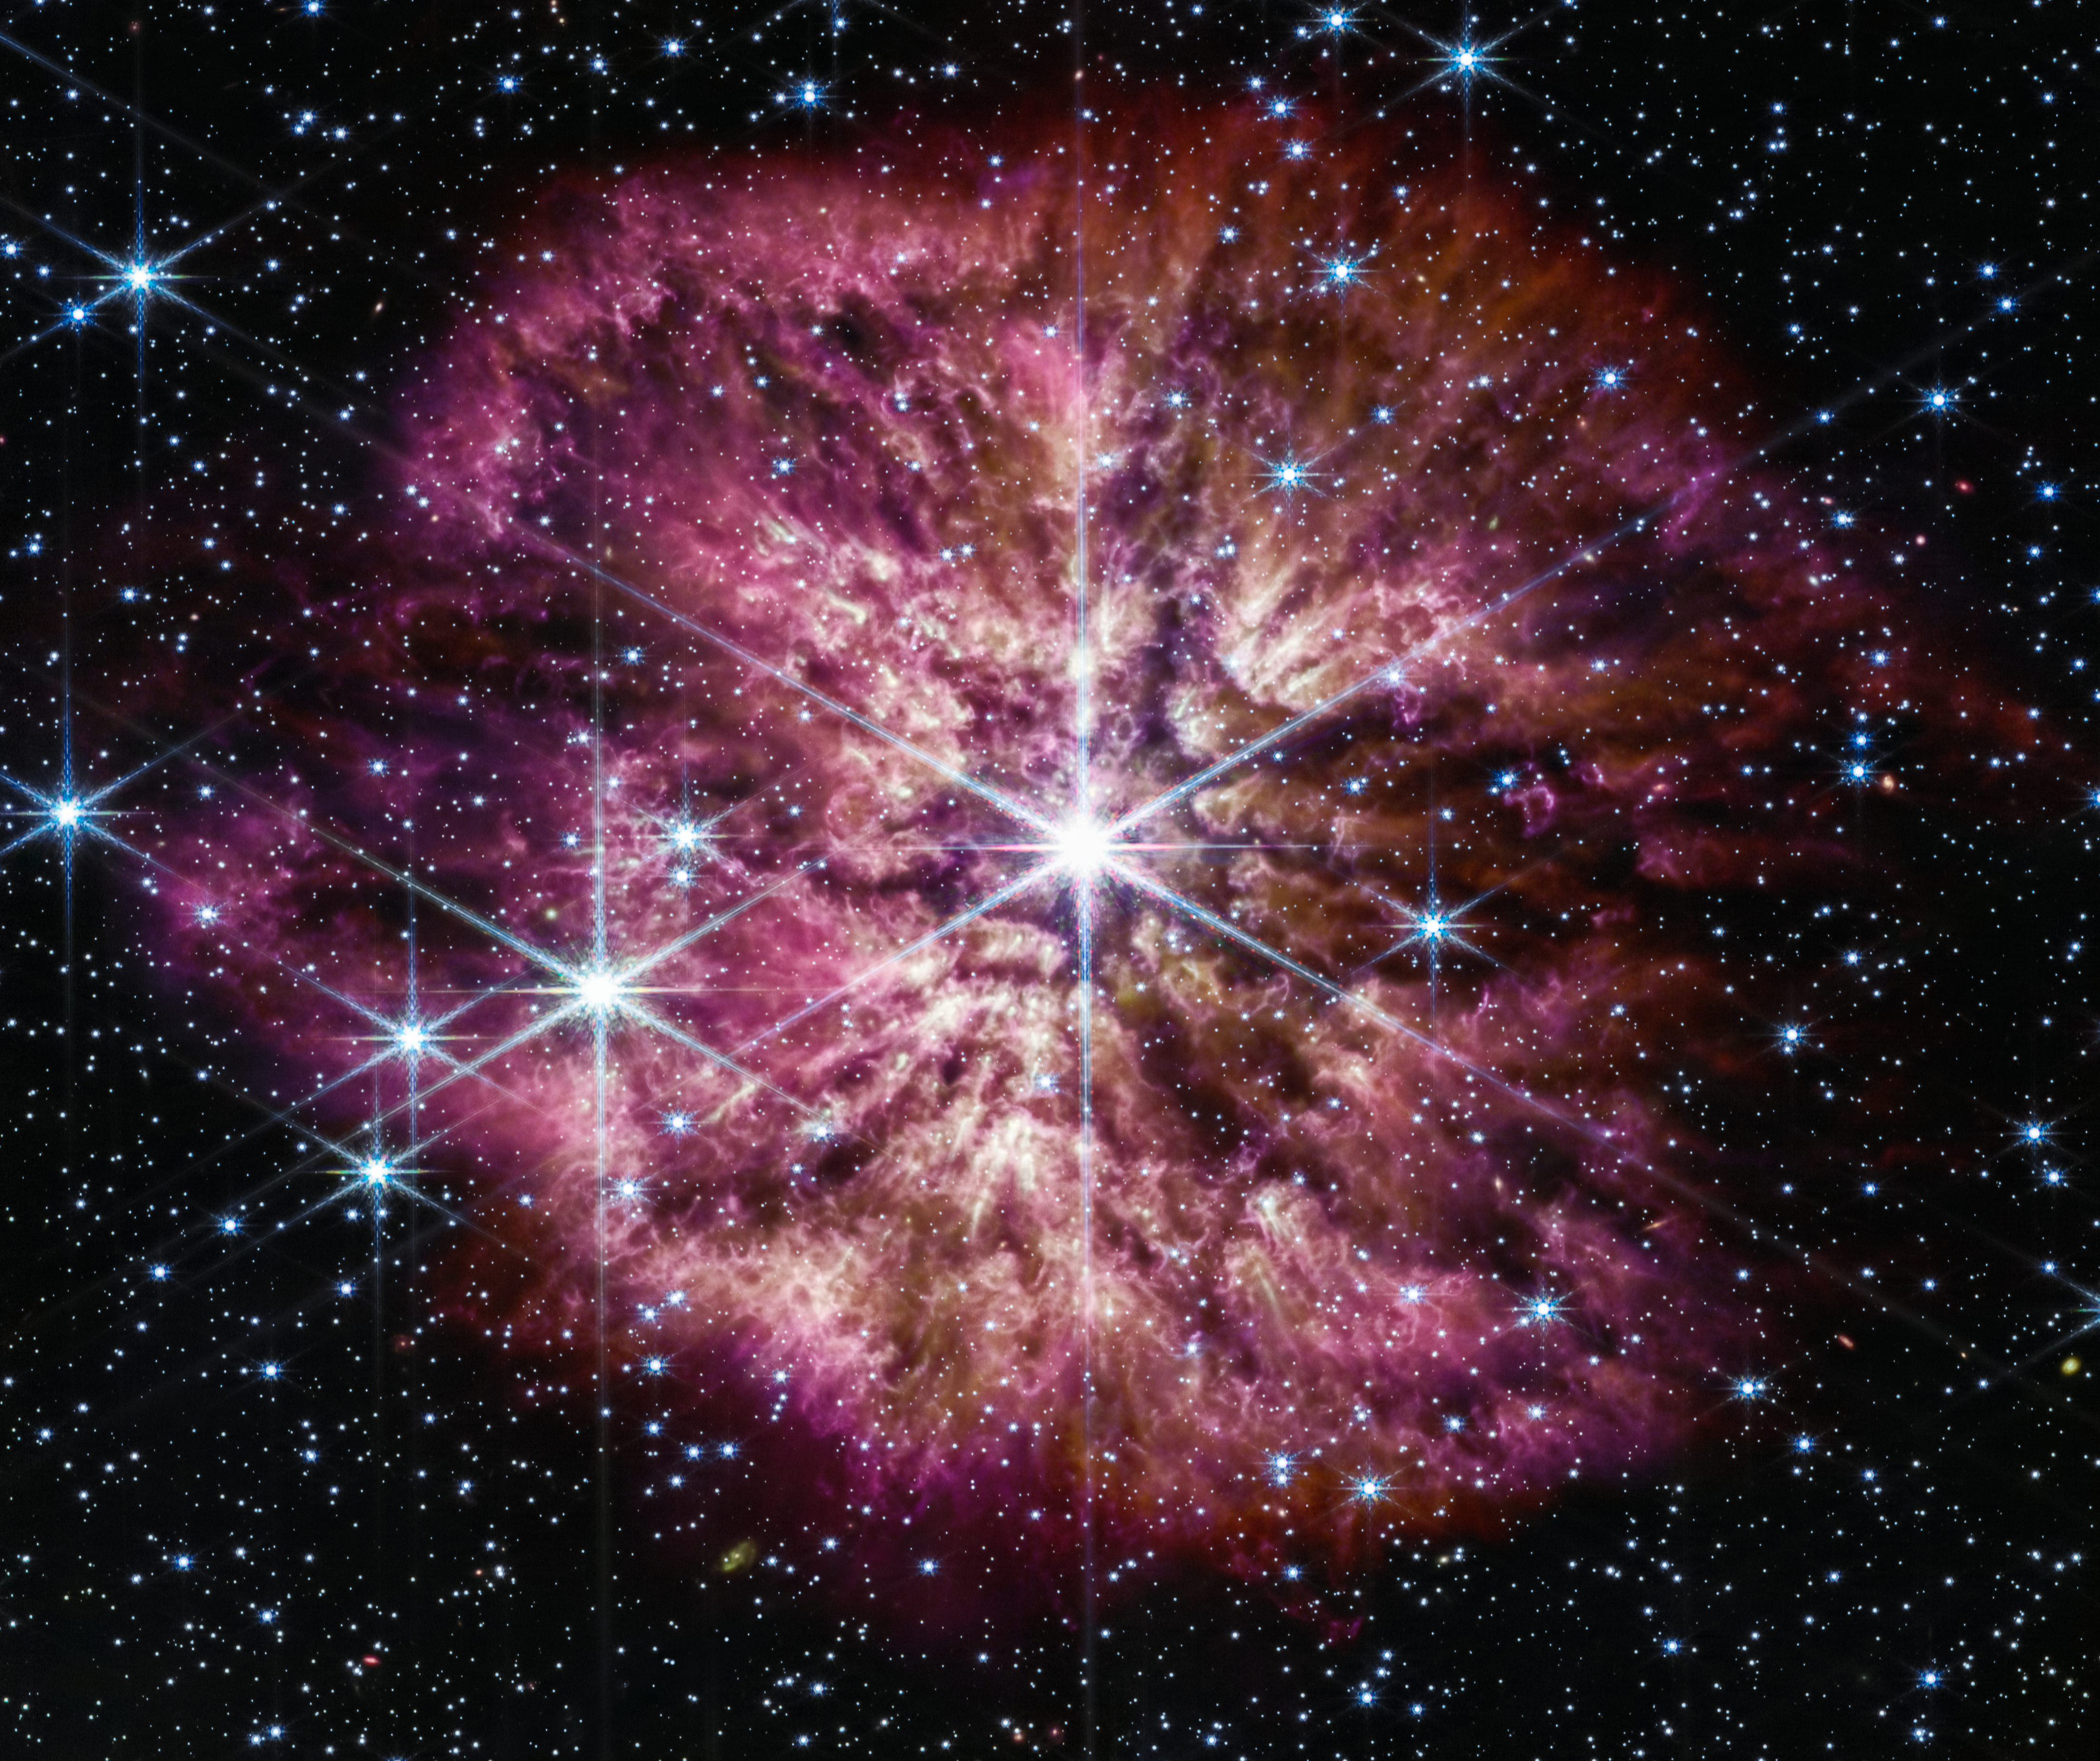

Wolf-Rayet 124 (NIRCam and MIRI composite image)

The luminous, hot star Wolf-Rayet 124 (WR 124) is prominent at the centre of the NASA/ESA/CSA James Webb Space Telescope’s composite image combining near-infrared and mid-infrared wavelengths of light. The star displays the characteristic diffraction spikes of Webb’s Near-infrared Camera (NIRCam), caused by the physical structure of the telescope itself. NIRCam effectively balances the brightness of the star with the fainter gas and dust surrounding it, while Webb’s Mid-Infrared Instrument (MIRI) reveals the nebula’s structure.

Background stars and galaxies populate the field of view and peek through the nebula of gas and dust that has been ejected from the ageing massive star. A history of the star’s past episodes of mass loss can be read in the nebula’s structure. Rather than smooth shells, the nebula is formed from random, asymmetric ejections. Bright clumps of gas and dust appear like tadpoles swimming toward the star, their tails streaming out behind them, blown back by the stellar wind.

Credit: NASA, ESA, CSA, STScI, Webb ERO Production Team